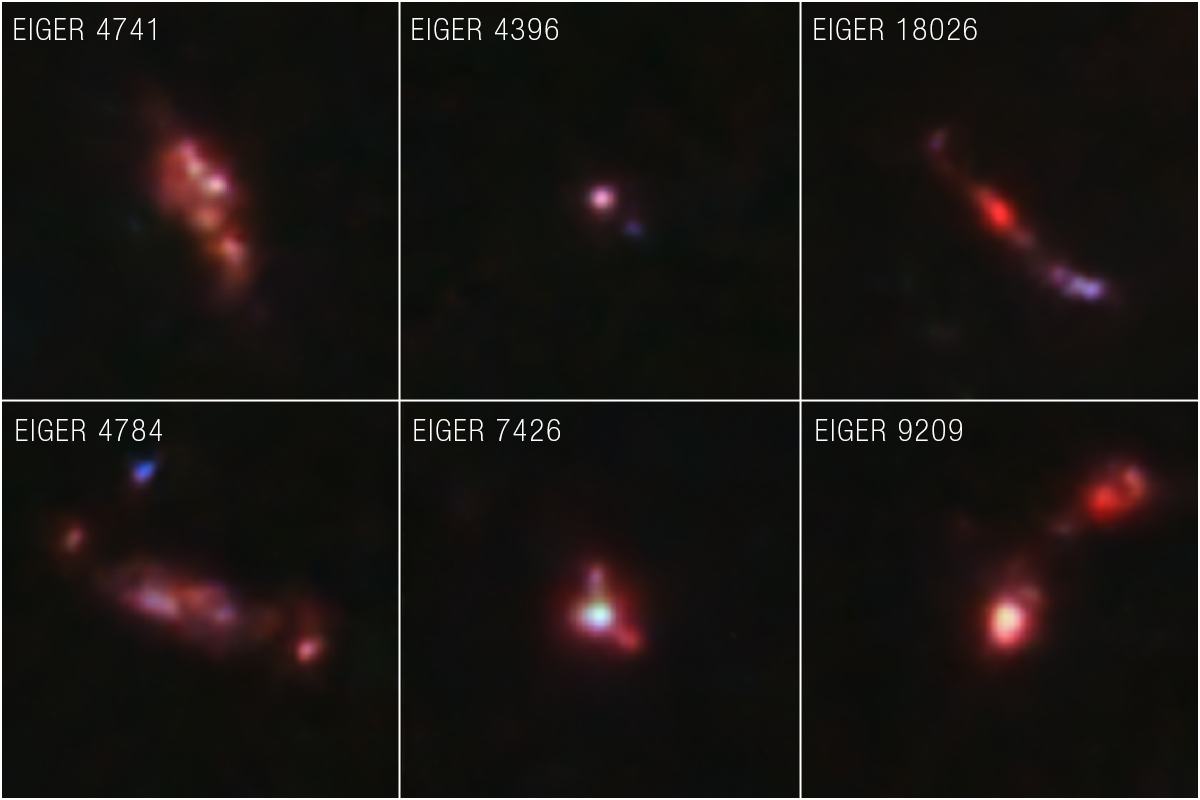

Distant Galaxy Samples Near Quasar J0100+2802 (NIRCam Image)

The NASA/ESA/CSA James Webb Space Telescope has returned extraordinarily detailed images and spectra of galaxies that existed when the Universe was only 900 million years old.

These galaxies look more chaotic than those in the nearby Universe – they are clumpy and often elongated. These galaxies are also younger and are actively forming stars. The stars Webb detected are all more massive, which may lead to an abundance of colourful supernovae shooting off in these galaxies.

A view of the larger field around quasar J0100+2802 can be found here.

These results were announced by members of the Emission-line galaxies and Intergalactic Gas in the Epoch of Reionization (EIGER) team. The team will eventually have images and data from six fields, each centred on a quasar, but Webb’s first image from NIRCam (Near-Infrared Camera) and data known as spectra are so detailed that they could easily make definitive conclusions without waiting for additional observations.

Credit: NASA, ESA, CSA, S. Lilly (ETH Zurich), D. Kashino (Nagoya University), J. Matthee (ETH Zurich), C. Eilers (MIT), R. Simcoe (MIT), R. Bordoloi (MIT), R. Mackenzie (ETH Zurich), A. Pagan (STScI)